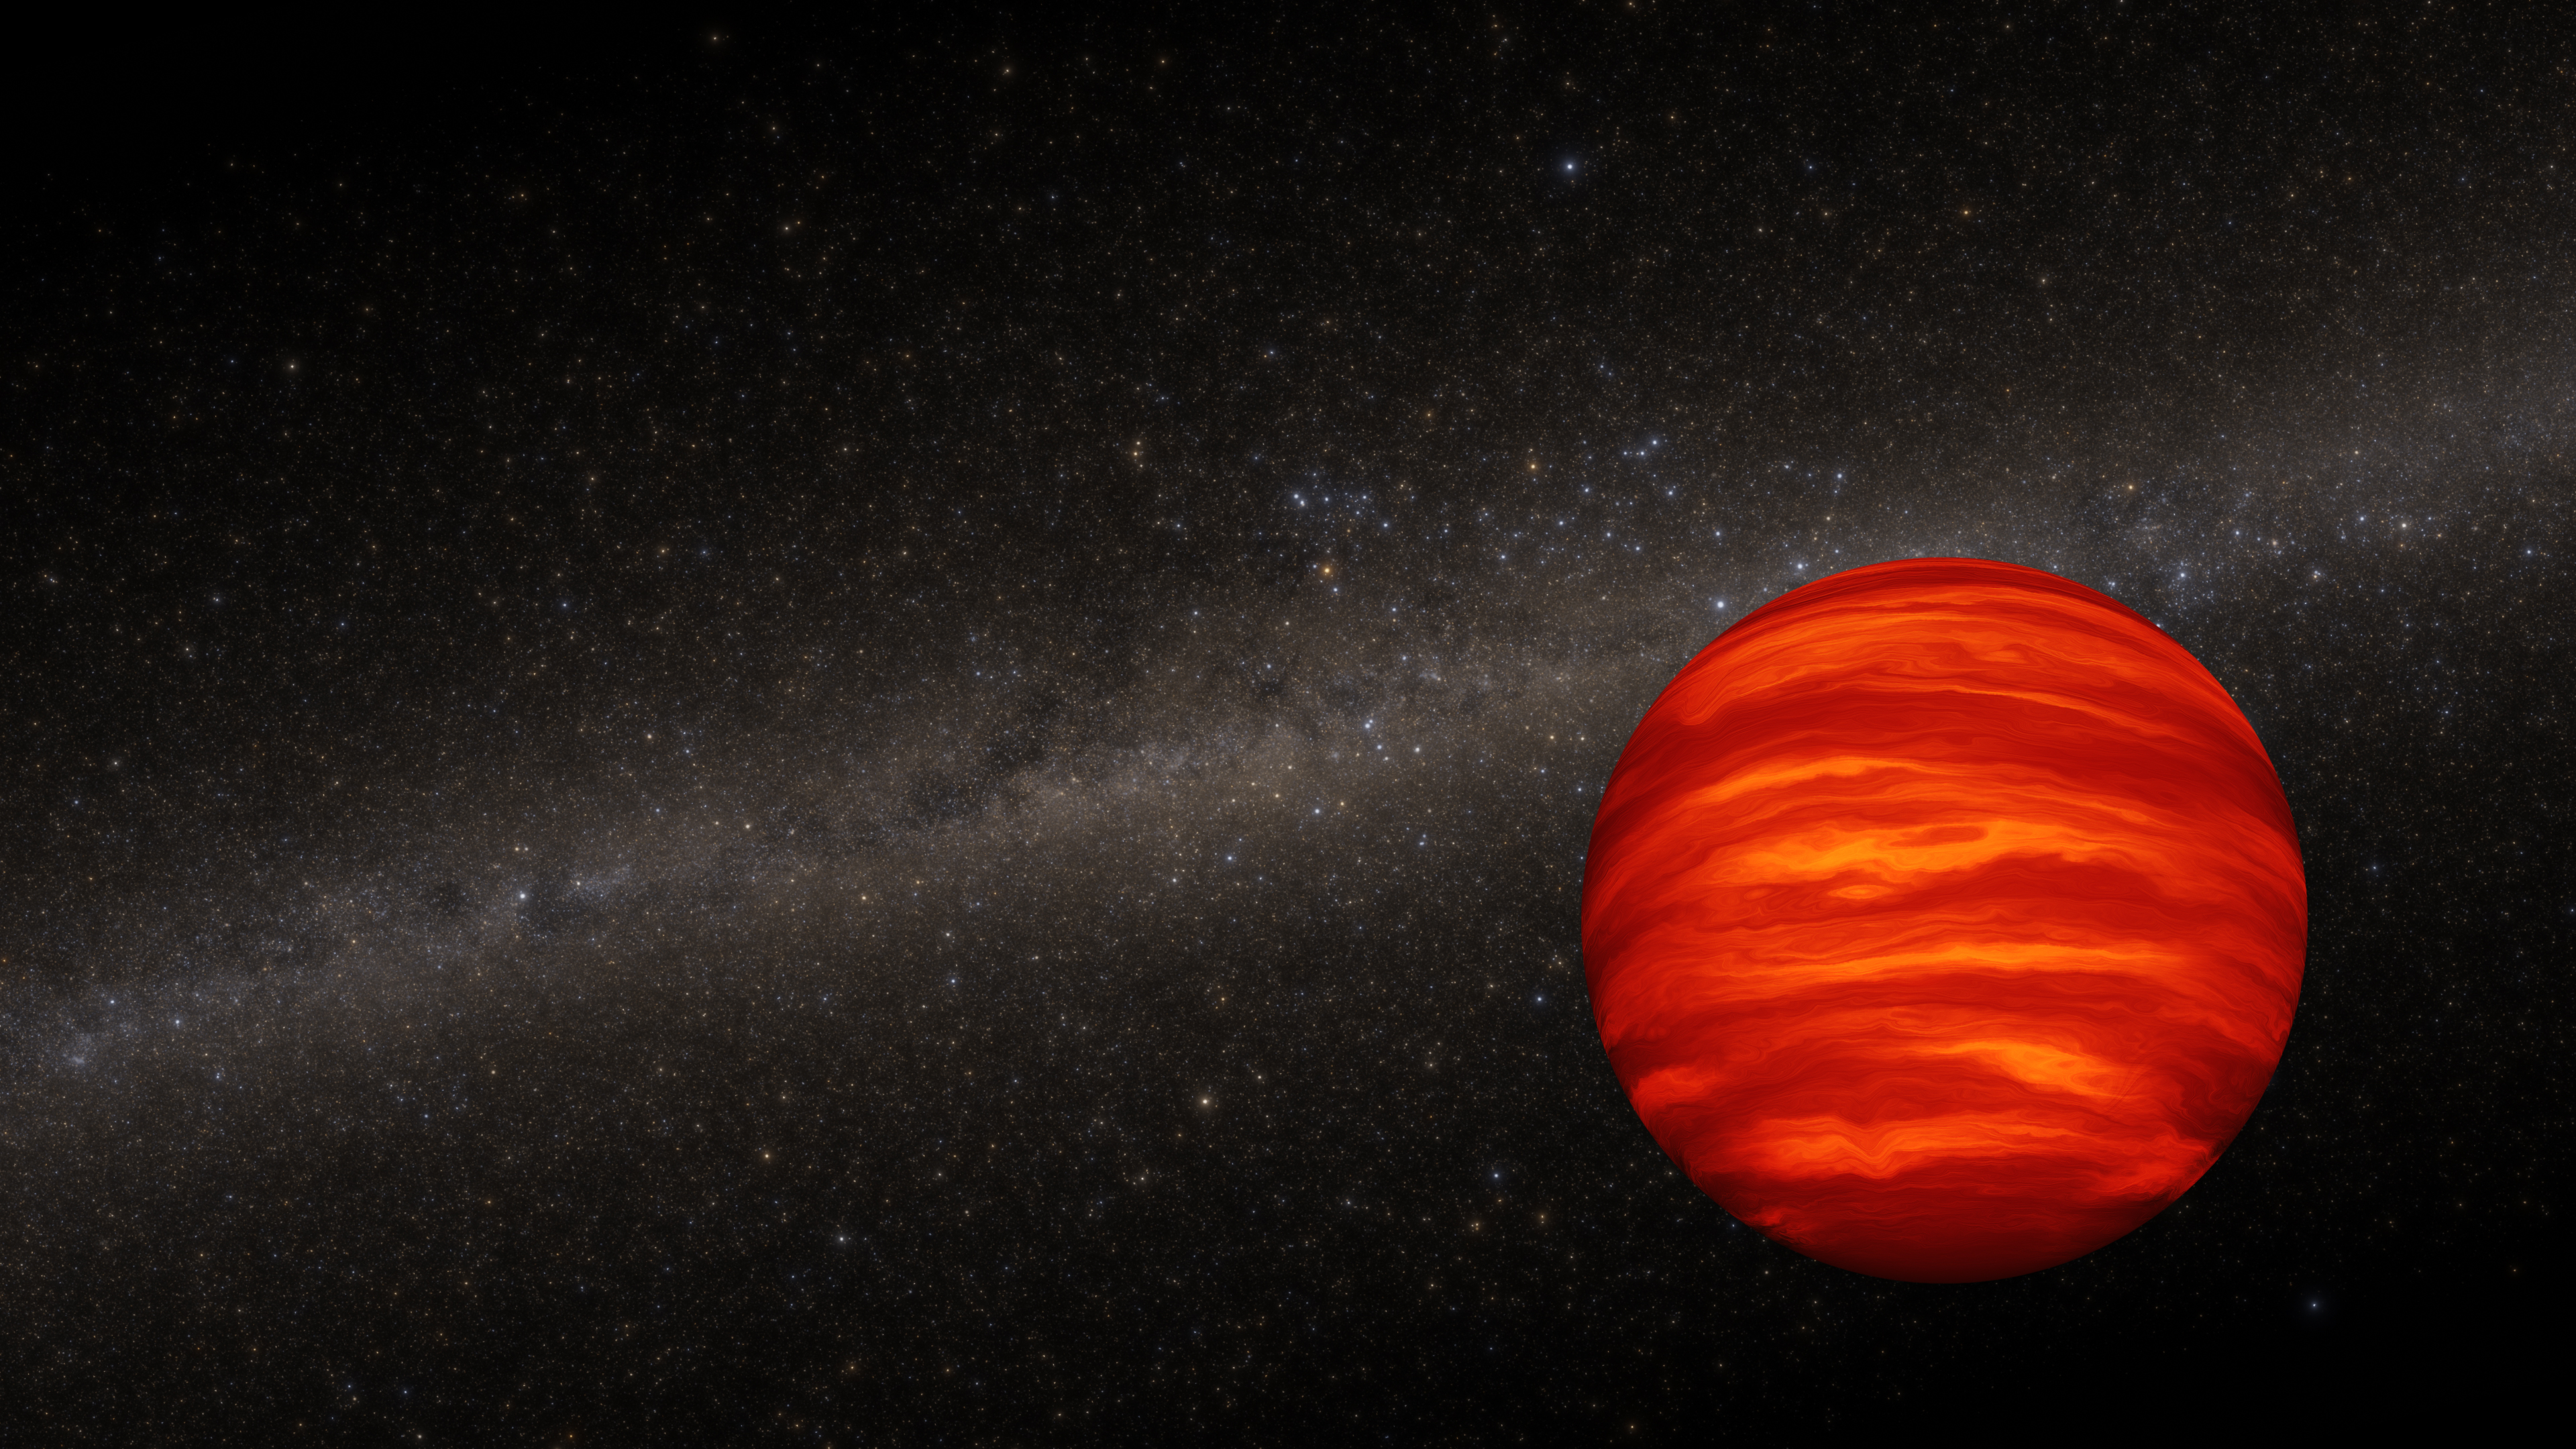

Brown dwarf (artist’s concept)

This is an artist’s representation of a brown dwarf. This class of object is too large to be a planet (and did not form in the same way), but is too small to be a star because it cannot sustain nuclear fusion, since it is less massive than even the smallest stars. A brown dwarf is likely to be marked by wind-driven horizontal bands of thick clouds that may alternate with relatively cloud-free bands, giving the object a striped appearance. Whirling storm systems as big as terrestrial continents, or even small planets, might exist.

The name ‘brown dwarf’ is actually a misnomer because the object would typically appear red to the naked eye. It is brightest in infrared light. Many brown dwarfs have binary companions. But as they age, the binary system drifts apart and each dwarf goes its separate way, according to a recent Hubble Space Telescope study.

The background stars in this illustration are a science visualisation assembled from the Gaia spacecraft star catalogue. The synthesised stars are accurate in terms of position, brightness, and colour. Because this is not an image of the Milky Way, missing are glowing nebulae and dark dust clouds.

Credit: NASA, ESA, J. Olmsted (STScI)